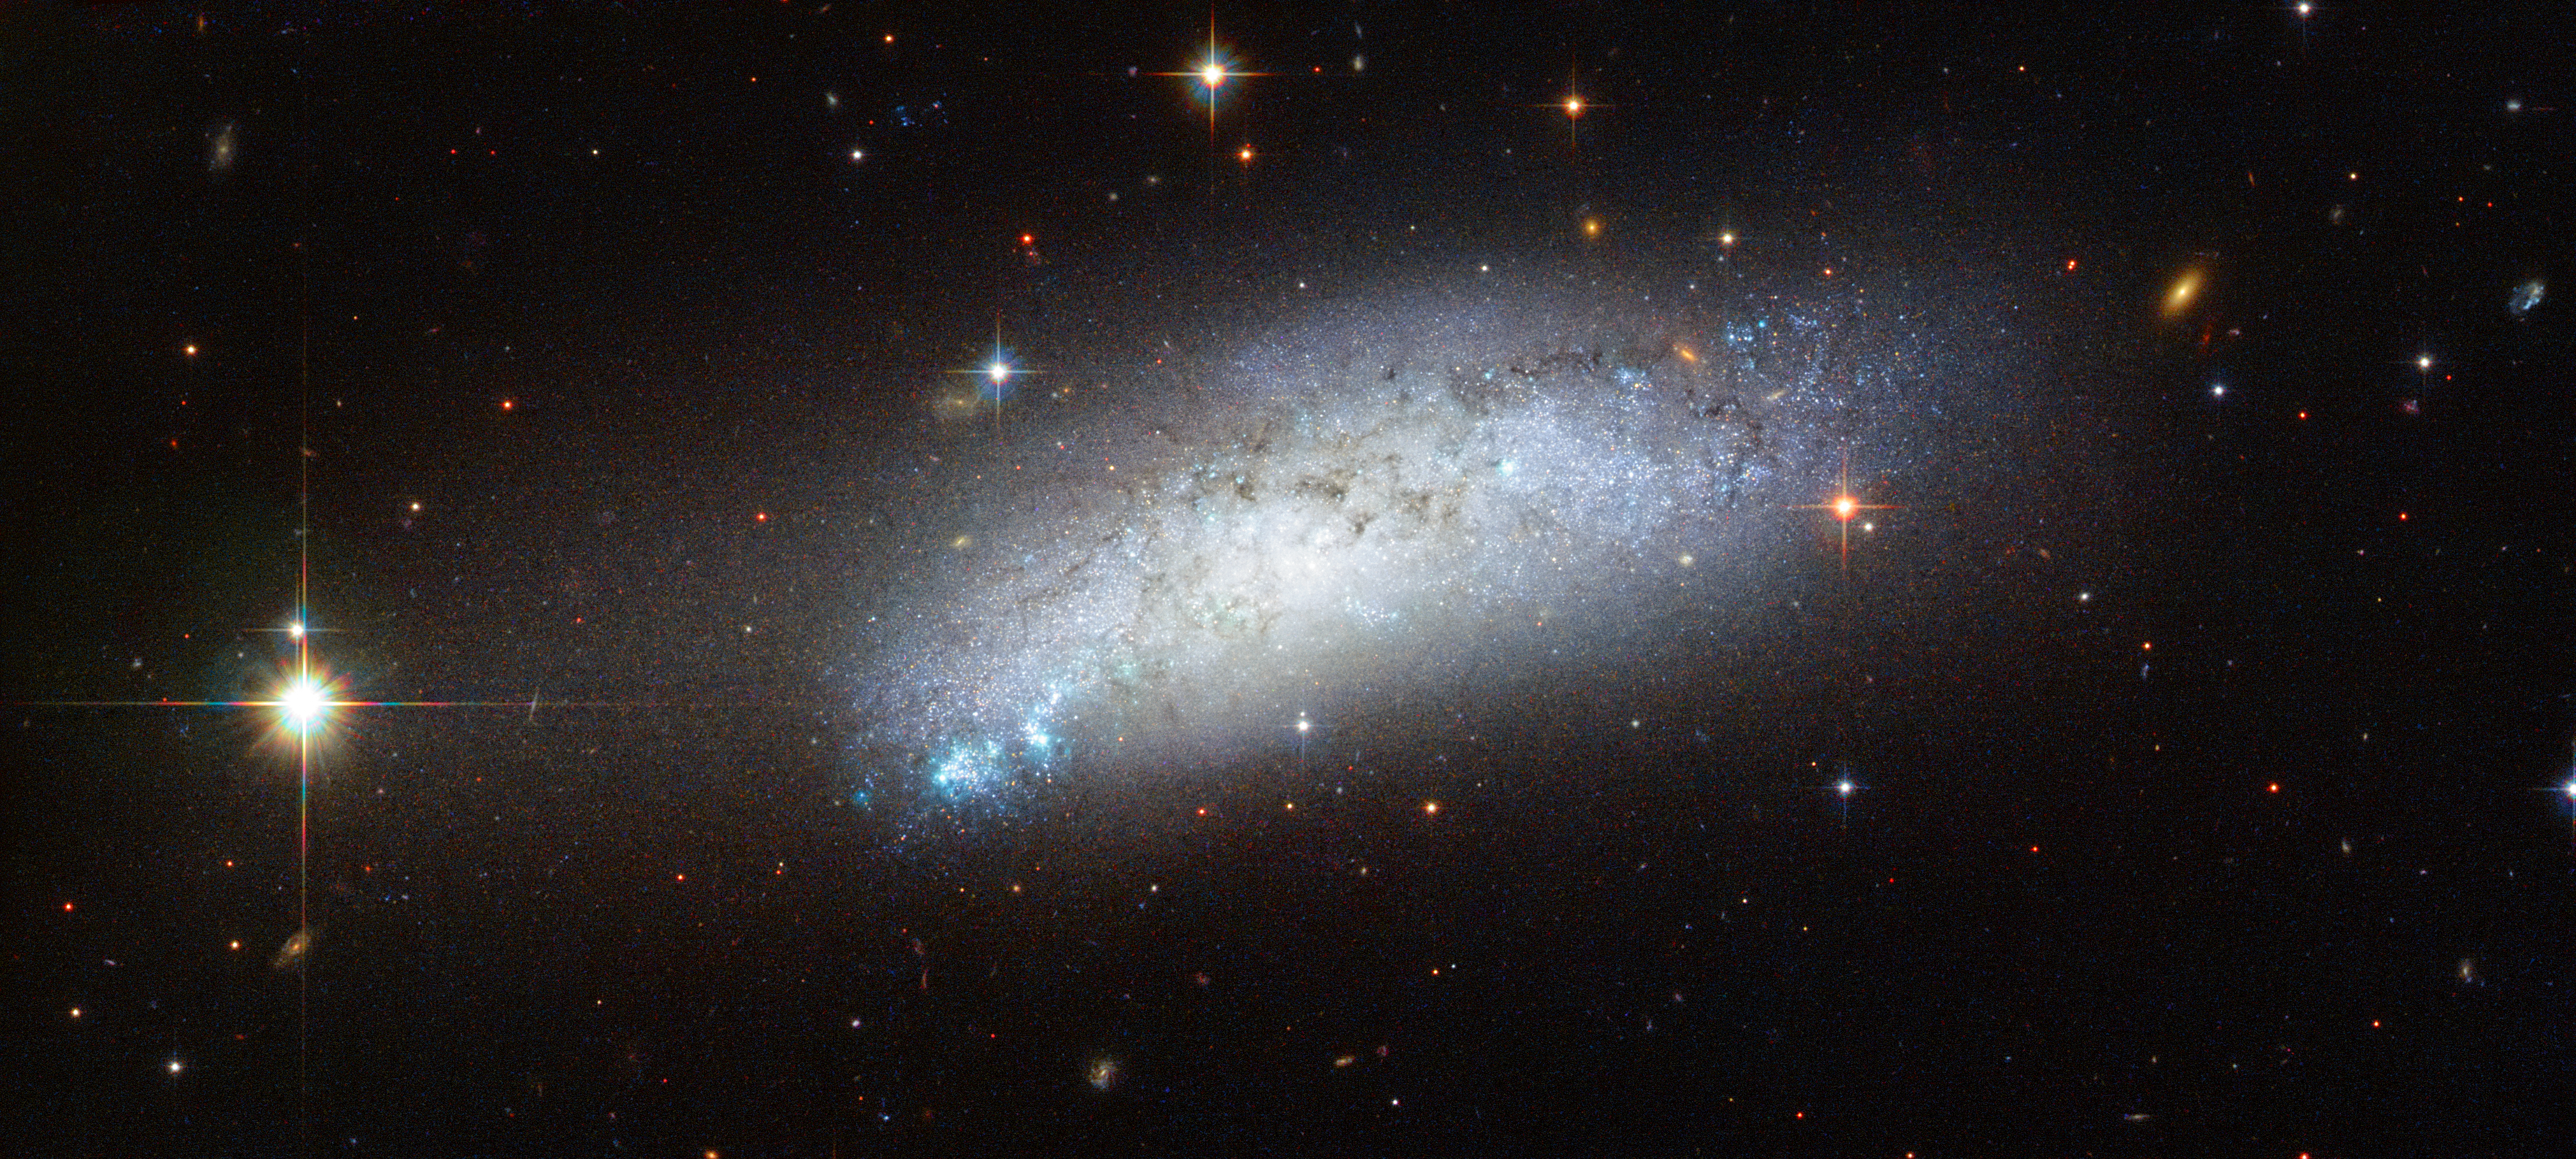

Extragalactic peculiarity

This galaxy goes by the name of ESO 162-17 and is located about 40 million light-years away in the constellation of Carina. At first glance this image seems like a fairly standard picture of a galaxy with dark patches of dust and bright patches of young, blue stars. However, a closer look reveals several peculiar features.

Firstly, ESO 162-17 is what is known as a peculiar galaxy — a galaxy that has gone through interactions with its cosmic neighbours, resulting in an unusual amount of dust and gas, an irregular shape, or a strange composition.

Secondly, on 23 February 2010 astronomers observed the supernova known as SN 2010ae nestled within this galaxy. The supernova belongs to a recently discovered class of supernovae called Type Iax supernovae. This class of objects is related to the better known Type-Ia supernovae.

Type Ia supernovae result when a white dwarf accumulates enough mass either from a companion or, rarely, through collision with another white dwarf, to initiate a catastrophic collapse followed by a spectacular explosion as a supernova. Type Iax supernovae also involve a white dwarf as the central star, but in this case it may survive the event. Type Iax supernovae are much fainter and rarer than Type Ia supernovae, and their exact mechanism is still a matter of open debate.

The rather beautiful four-pointed shape of foreground stars distributed around ESO 162-17 also draws the eye. This is an optical effect introduced as the incoming light is diffracted by the four struts that support the Hubble Space Telescope’s small secondary mirror.

Credit: ESA/Hubble & NASA